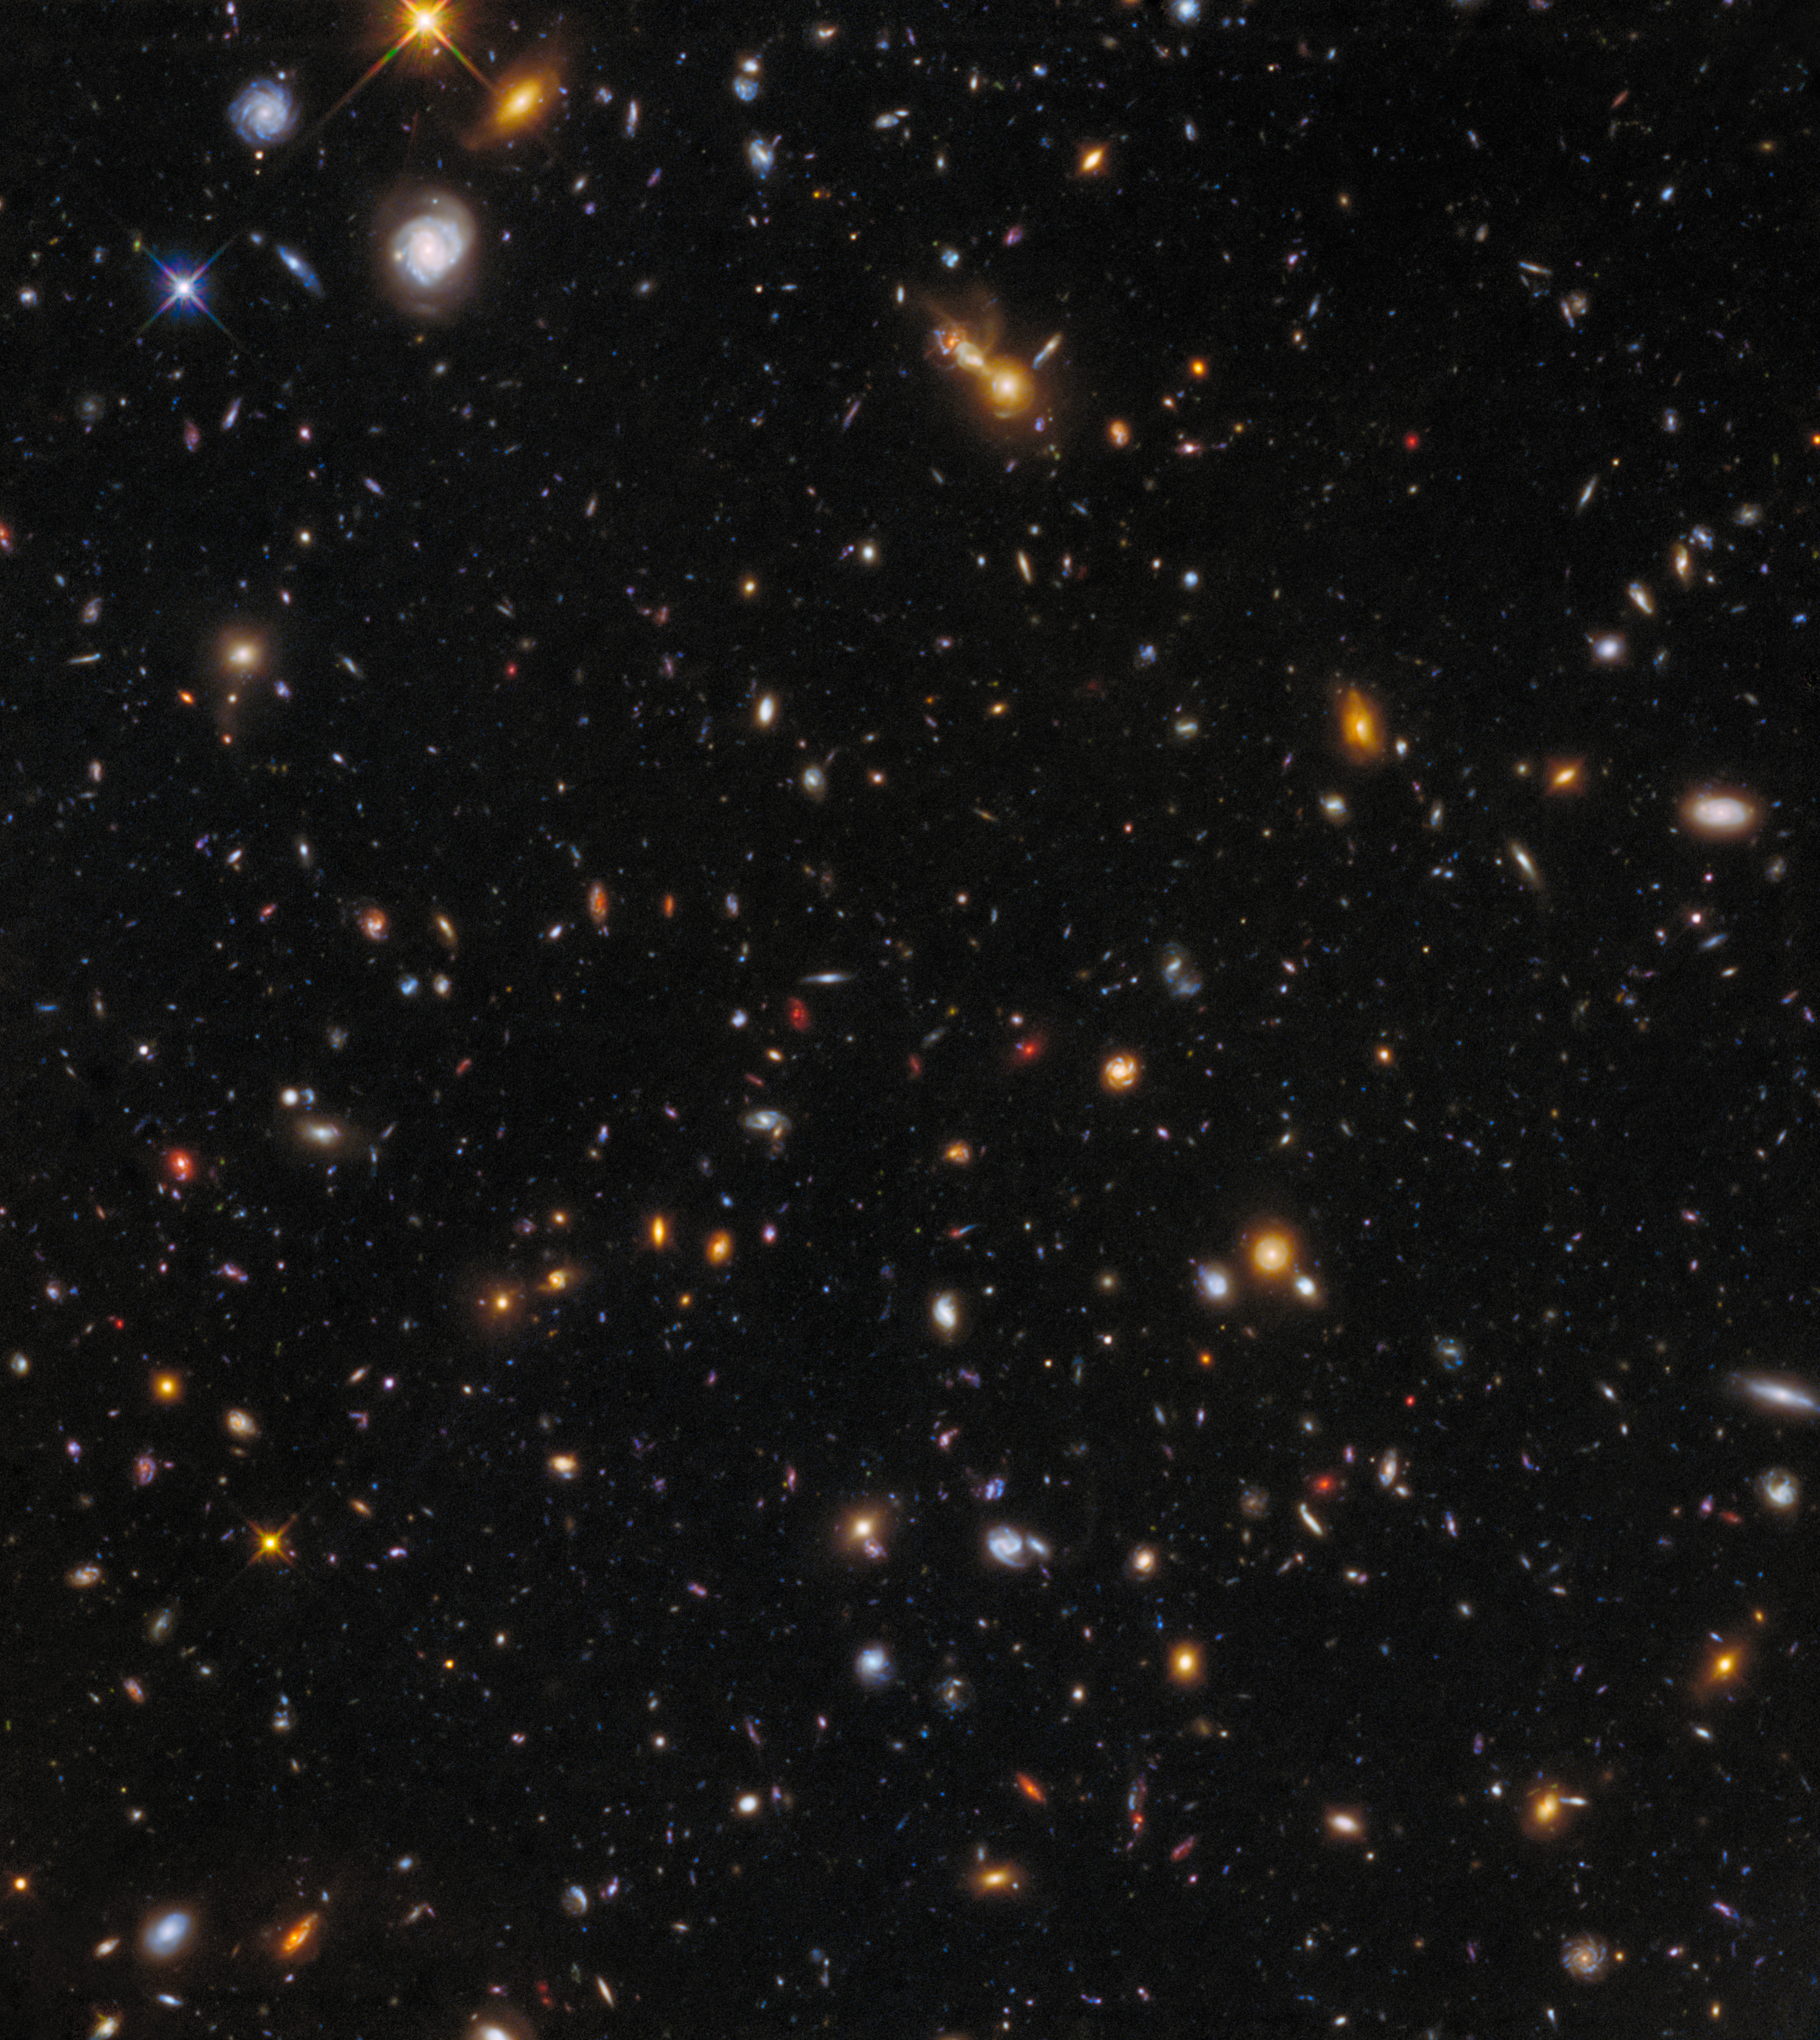

Abell 370 parallel field

While one eye of Hubble was observing its main target, the massive galaxy cluster Abell 370, the second eye — another instrument — was looking at a part of the sky right next to the cluster.

Although not as spectacular as the light-bending clusters, these parallel fields are as deep as the main images and can even compete with the famous Hubble Deep Field as regards depth. They are therefore a valuable tool for studying the evolution of galaxies from the early epochs of the Universe until today.

Credit: NASA, ESA/Hubble, HST Frontier Fields